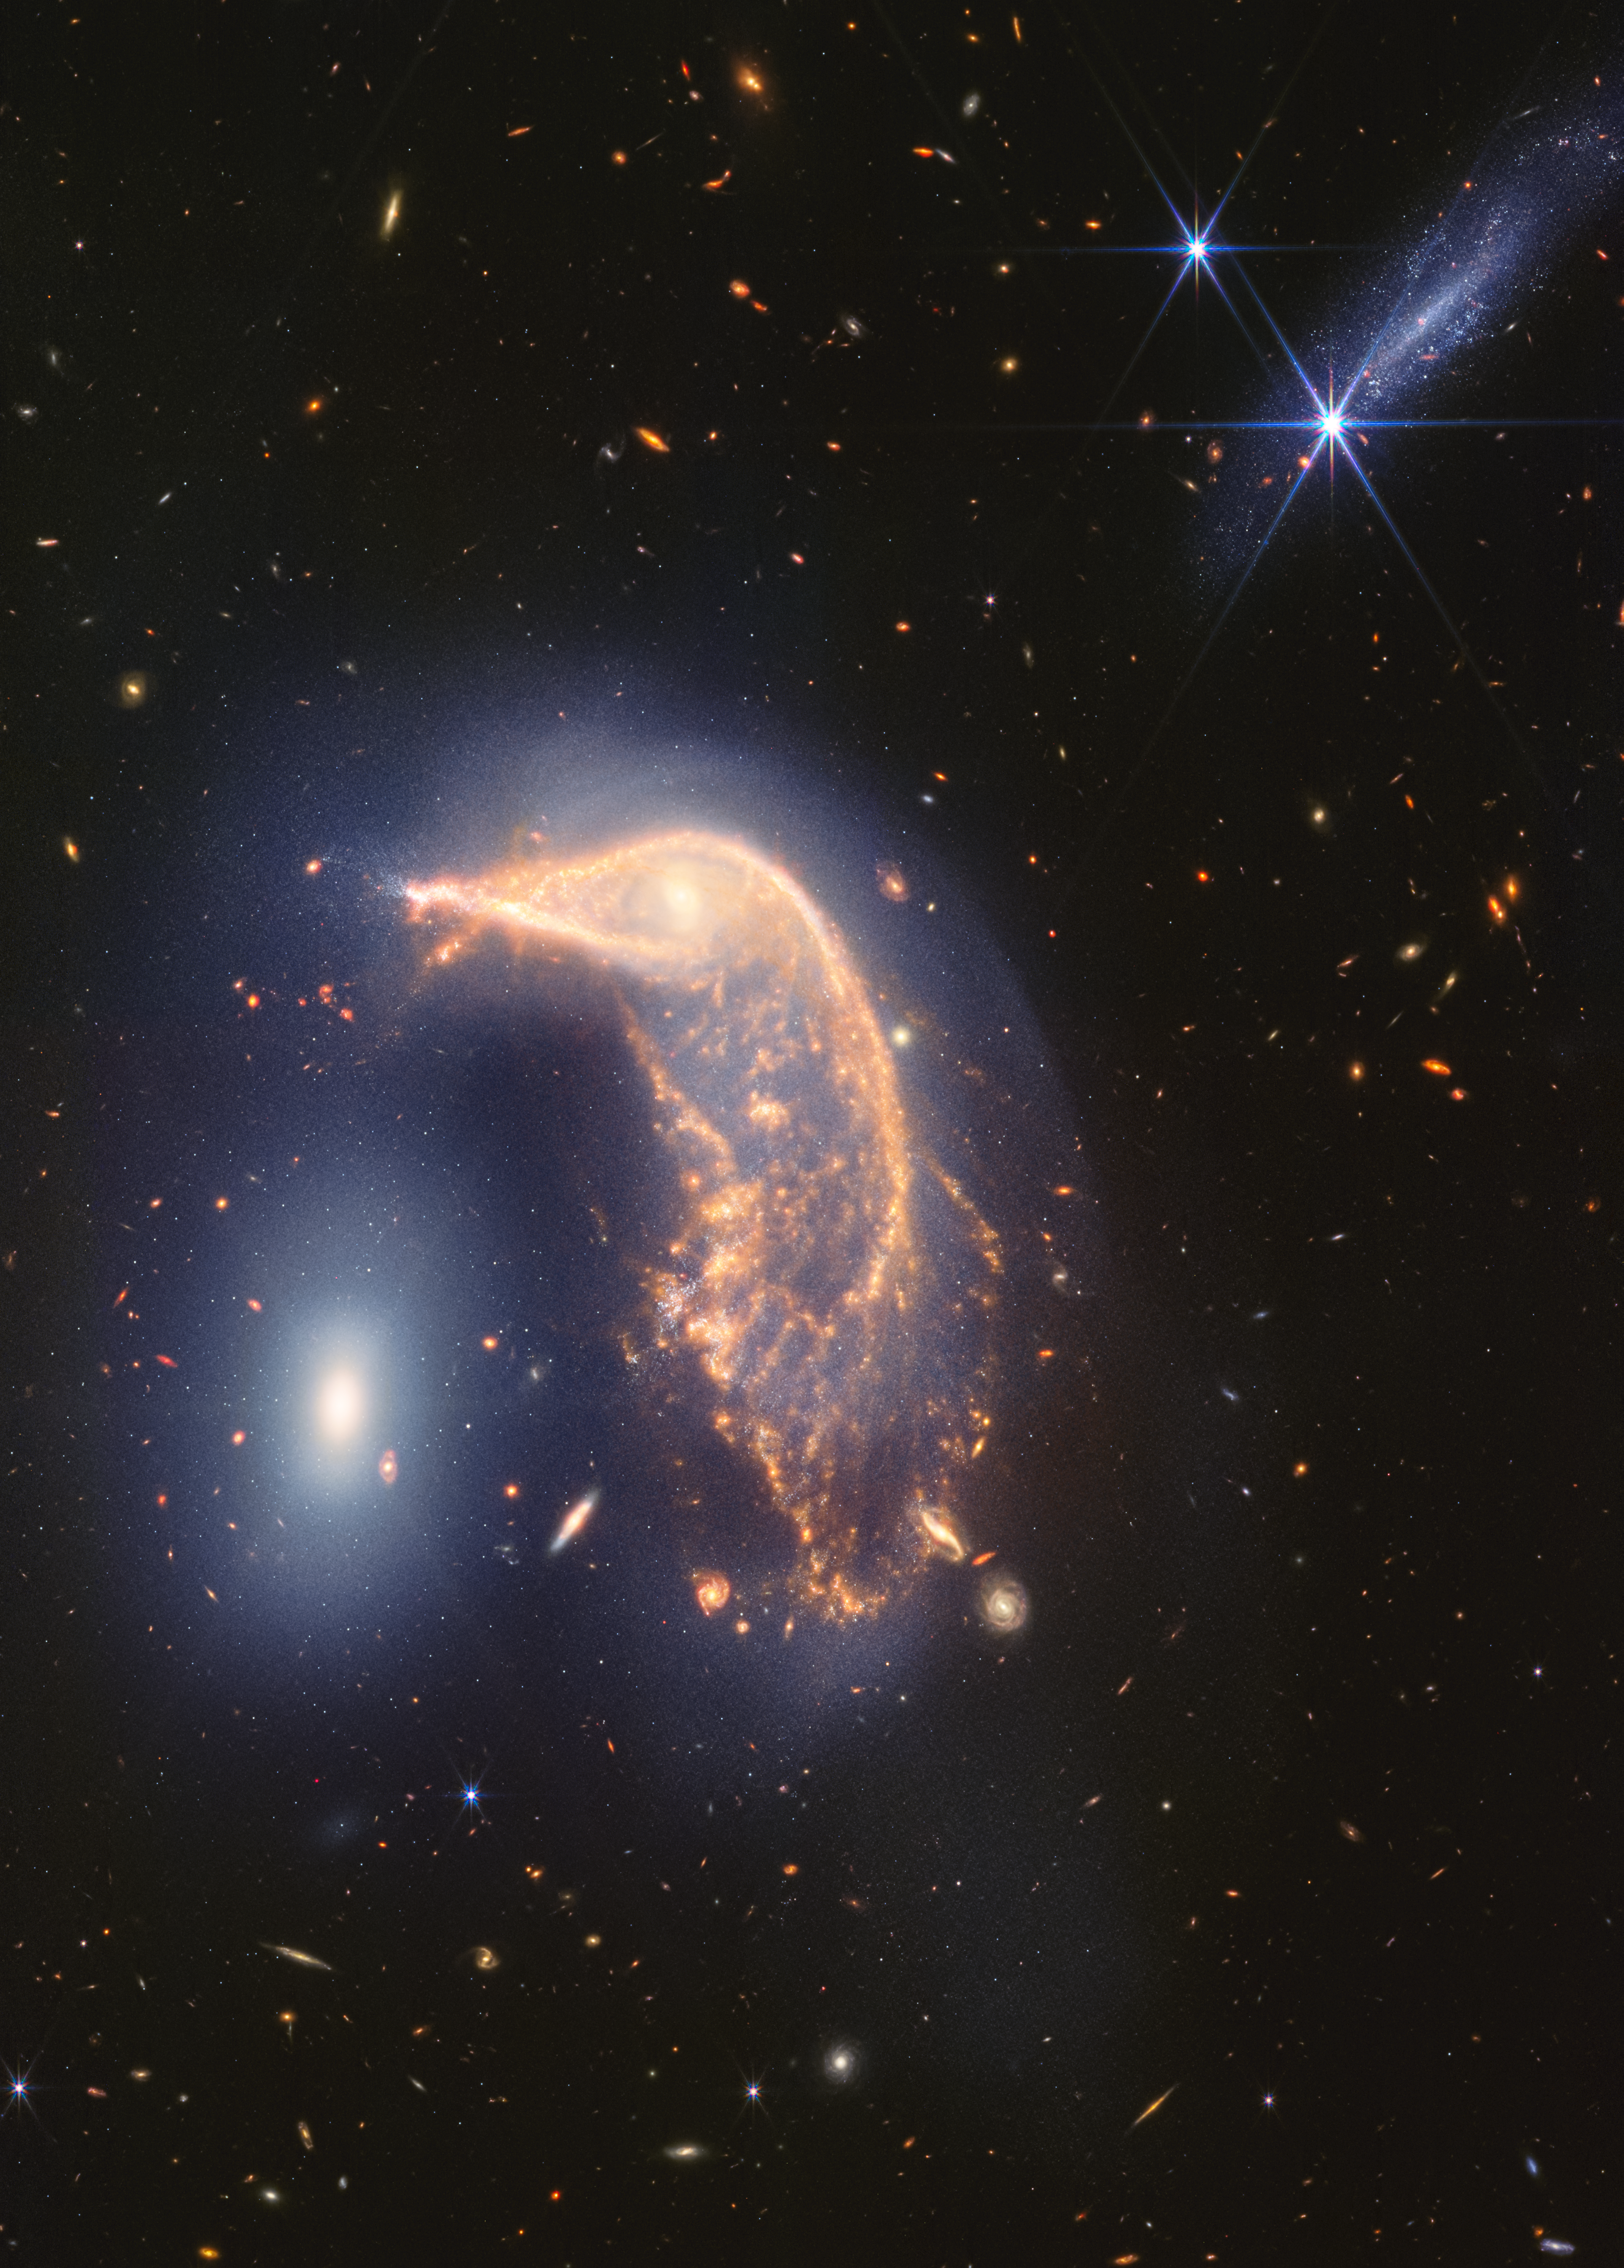

Interacting galaxies Arp 142 (NIRCam and MIRI image)

The distorted spiral galaxy at the centre, the Penguin, and the compact elliptical galaxy at the left, the Egg, are locked in an active embrace. A new near- and mid-infrared image from the James Webb Space Telescope, taken to mark its second year of science, shows that their interaction is marked by a faint upside-down U-shaped blue glow.

The pair, known jointly as Arp 142, made their first pass between 25 and 75 million years ago — causing ‘fireworks’, or new star formation, in the Penguin. In the most extreme cases, mergers can cause galaxies to form thousands of new stars per year for a few million years. For the Penguin, research has shown that about 100 to 200 stars have formed per year. By comparison, our Milky Way galaxy (which is not interacting with a galaxy of the same size) forms roughly six to seven new stars per year.

This gravitational shimmy also remade the Penguin’s appearance. Its coiled spiral arms unwound, and gas and dust were pulled in an array of directions, like it was releasing confetti. It is rare for individual stars to collide when galaxies interact (space is vast), but the galaxies’ mingling disrupts their stars’ orbits.

Today, the Penguin’s galactic centre looks like an eye set within a head, and the galaxy has prominent star trails that take the shape of a beak, backbone, and fanned-out tail. A faint, but prominent dust lane extends from its beak down to its tail.

Despite the Penguin appearing far larger than the Egg, these galaxies have approximately the same mass. This is one reason why the smaller-looking Egg hasn’t yet merged with the Penguin. (If one was less massive, it may have merged earlier.)

The oval Egg is filled with old stars, and little gas and dust, which is why it isn’t sending out ‘streamers’ or tidal tails of its own and instead has maintained a compact oval shape. If you look closely, the Egg has four prominent diffraction spikes — the galaxy’s stars are so concentrated that it gleams.

Now, find the bright, edge-on galaxy at top right. It may look like a party crasher, but it’s not nearby. Cataloged PGC 1237172, it lies 100 million light-years closer to Earth. It is relatively young and isn’t overflowing with dust, which is why it practically disappears in Webb’s mid-infrared view.

The background of this image is overflowing with far more distant galaxies. This is a testament to the sensitivity and resolution of Webb’s infrared cameras.

Arp 142 lies 326 million light-years from Earth in the constellation Hydra.

Credit: NASA, ESA, CSA, STScI